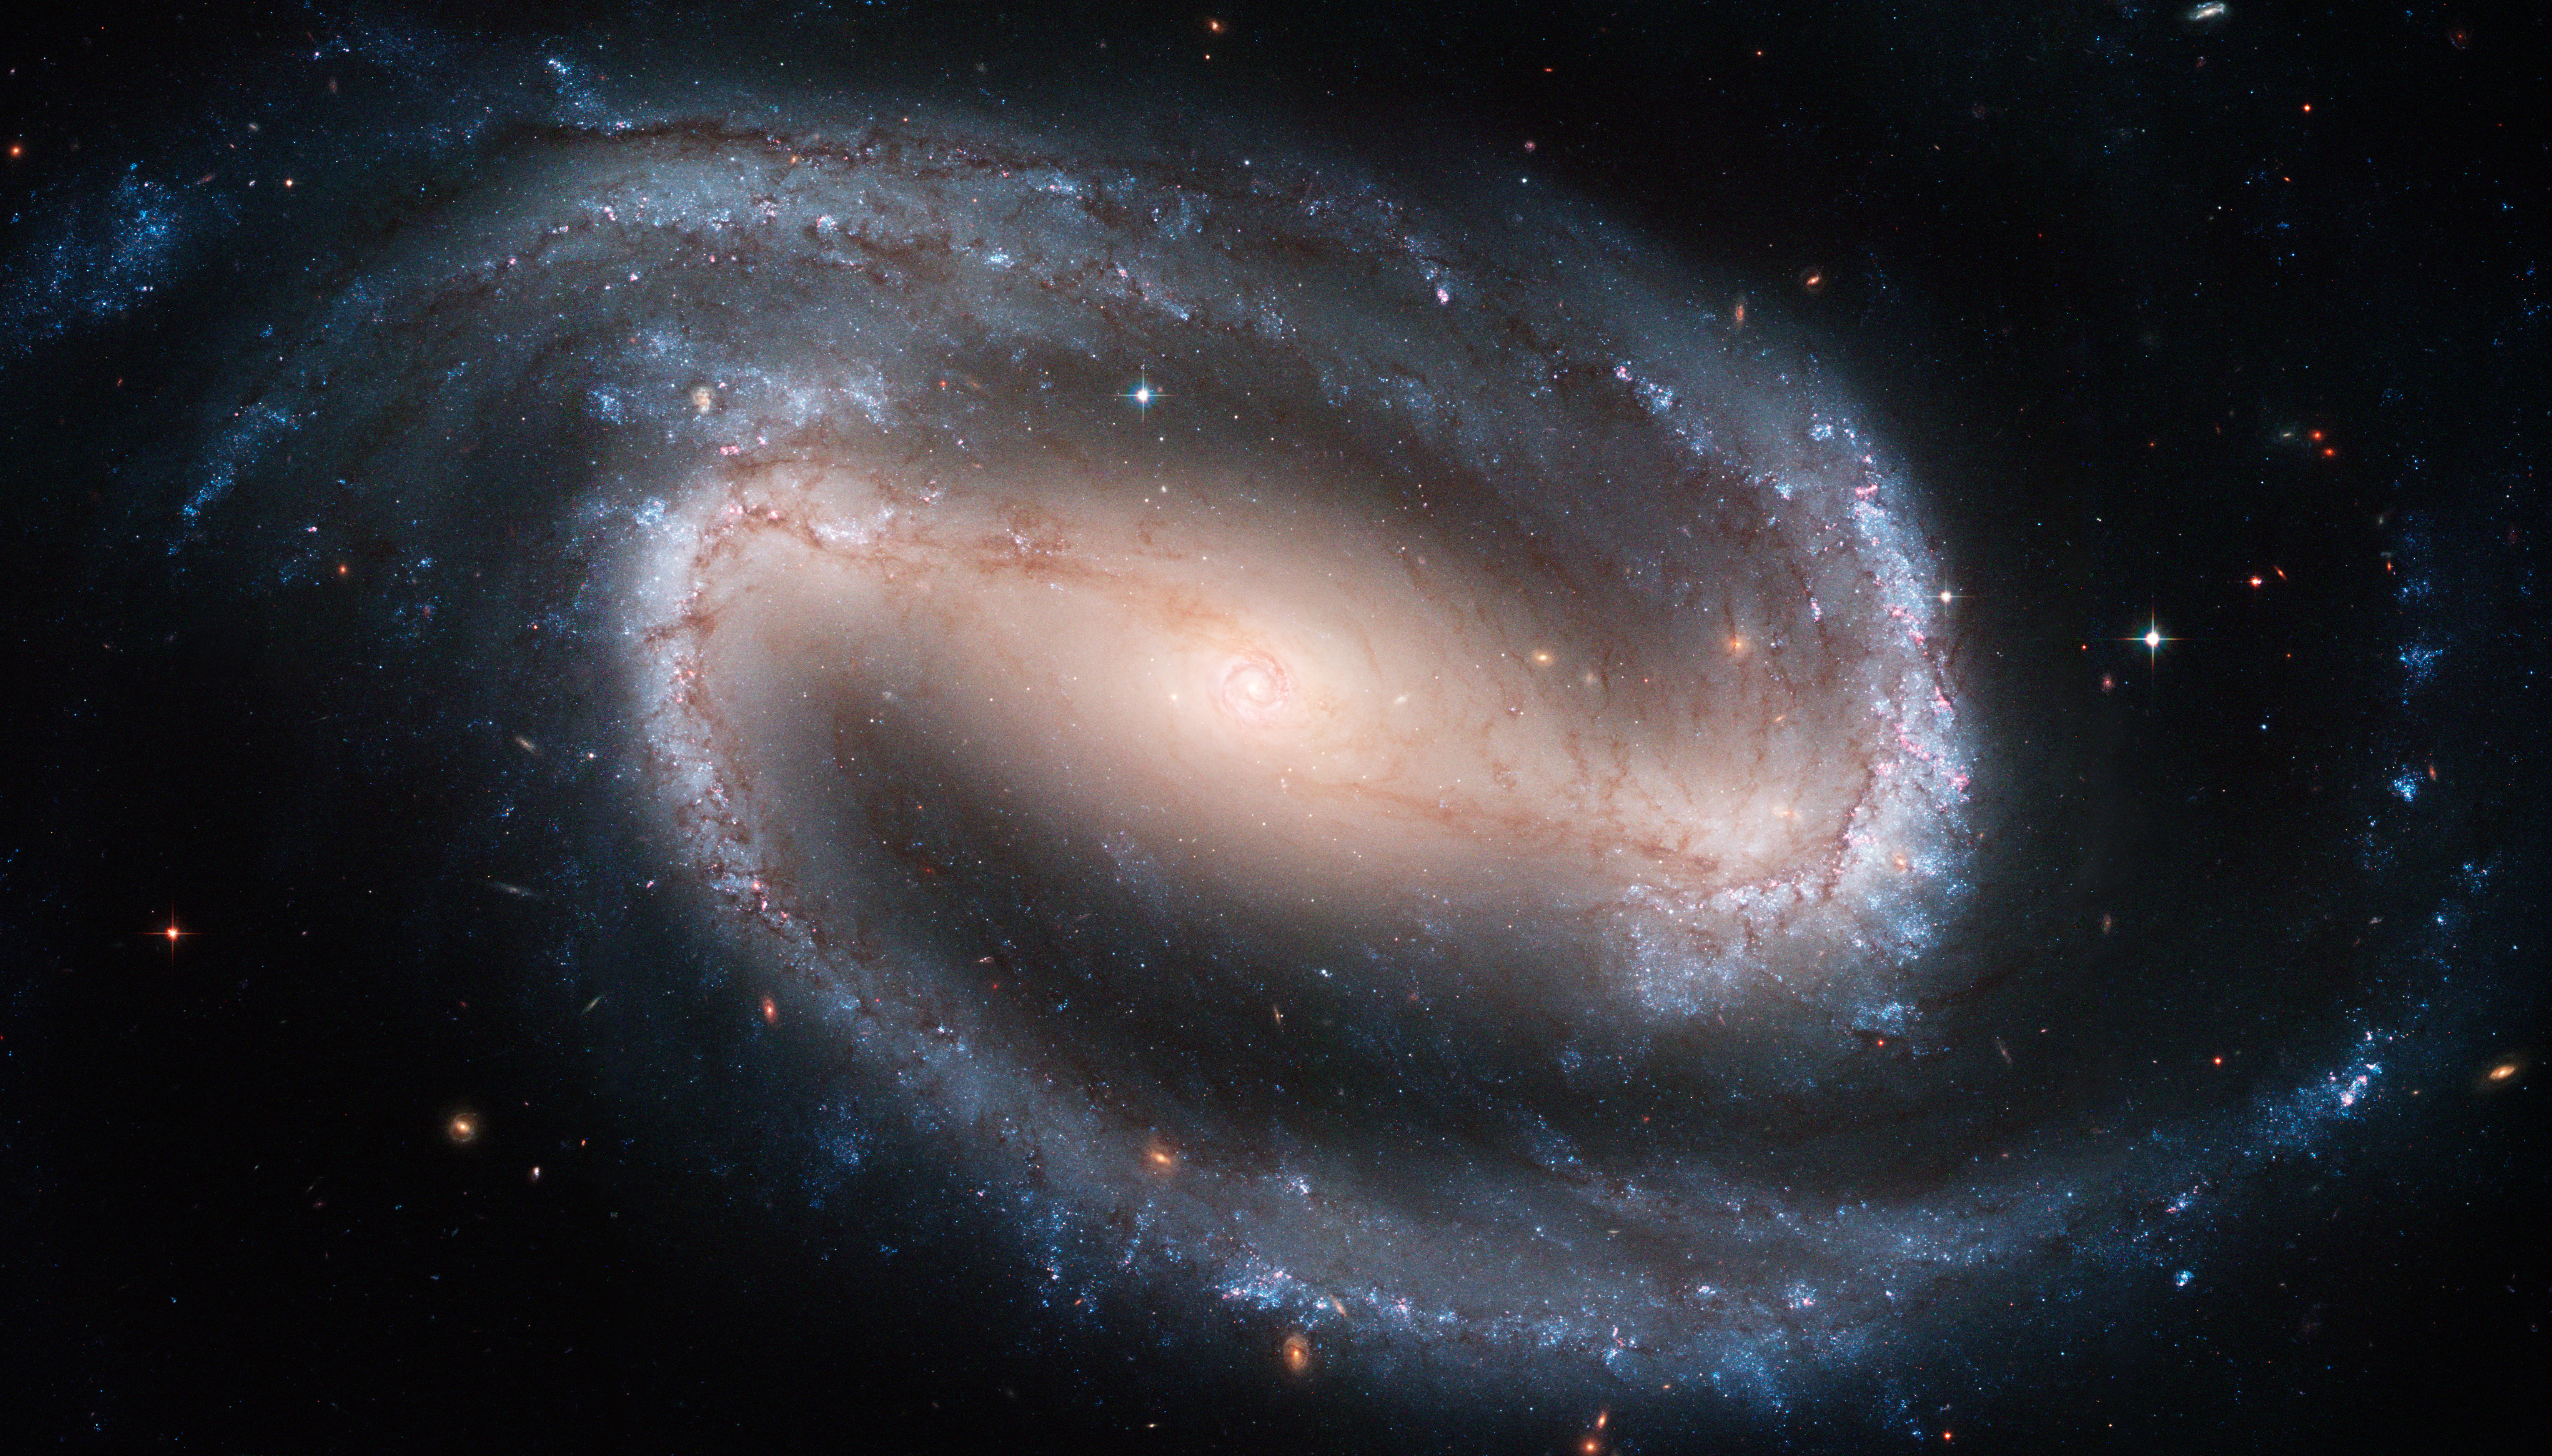

A poster-size image of the beautiful barred spiral galaxy NGC 1300

One of the largest Hubble Space Telescope images ever made of a complete galaxy is being unveiled today at the American Astronomical Society meeting in San Diego, Calif.

The Hubble telescope captured a display of starlight, glowing gas, and silhouetted dark clouds of interstellar dust in this 4-foot-by-8-foot image of the barred spiral galaxy NGC 1300. NGC 1300 is considered to be prototypical of barred spiral galaxies. Barred spirals differ from normal spiral galaxies in that the arms of the galaxy do not spiral all the way into the center, but are connected to the two ends of a straight bar of stars containing the nucleus at its center.

Credit: NASA, ESA, and The Hubble Heritage Team (STScI/AURA)